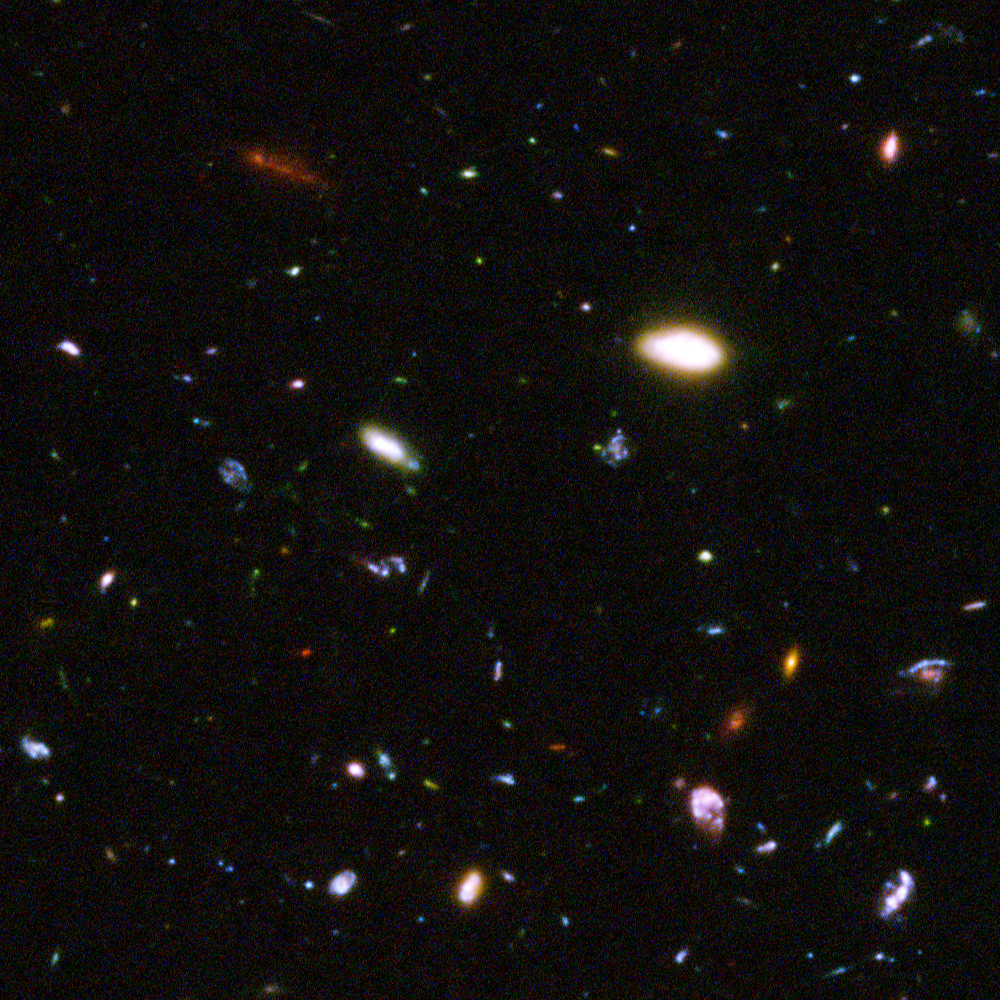

Hubble reveals galactic drama [image 4]

A galactic brawl. A close encounter with a spiral galaxy. Blue wisps of galaxies. These close-up snapshots of galaxies in the Hubble Ultra Deep Field reveal the drama of galactic life. Here close encounters between galaxies that have been shredded by the interactions are seen. These oddball galaxies chronicle a period when the universe was younger and more chaotic. Order and structure were just beginning to emerge.

The galaxies in this panel were plucked from a harvest of nearly 10,000 galaxies in the Ultra Deep Field, the deepest visible-light image of the cosmos.

The Ultra Deep Field observations, taken by the Advanced Camera for Surveys, represent a narrow, "deep" view of the cosmos. Peering into the Ultra Deep Field is like looking through a 2.5 metre-long soda straw.

In ground-based images, the patch of sky in which the galaxies reside (just one-tenth the diameter of the full Moon) is largely empty. Located in the constellation Fornax, the region is so empty, in fact, that only a handful of stars within the Milky Way galaxy can be seen in the image.

In this image, blue and green correspond to colours that can be seen by the human eye, such as hot, young, blue stars and the glow of Sun-like stars in the disks of galaxies. Red represents near-infrared light, which is invisible to the human eye, such as the red glow of dust-enshrouded galaxies.

The image required 800 exposures taken over the course of 400 Hubble orbits around Earth. The total amount of exposure time was 11.3 days, taken between Sept. 24, 2003 and Jan. 16, 2004.

Credit: NASA, ESA, and S. Beckwith (STScI) and the HUDF Team